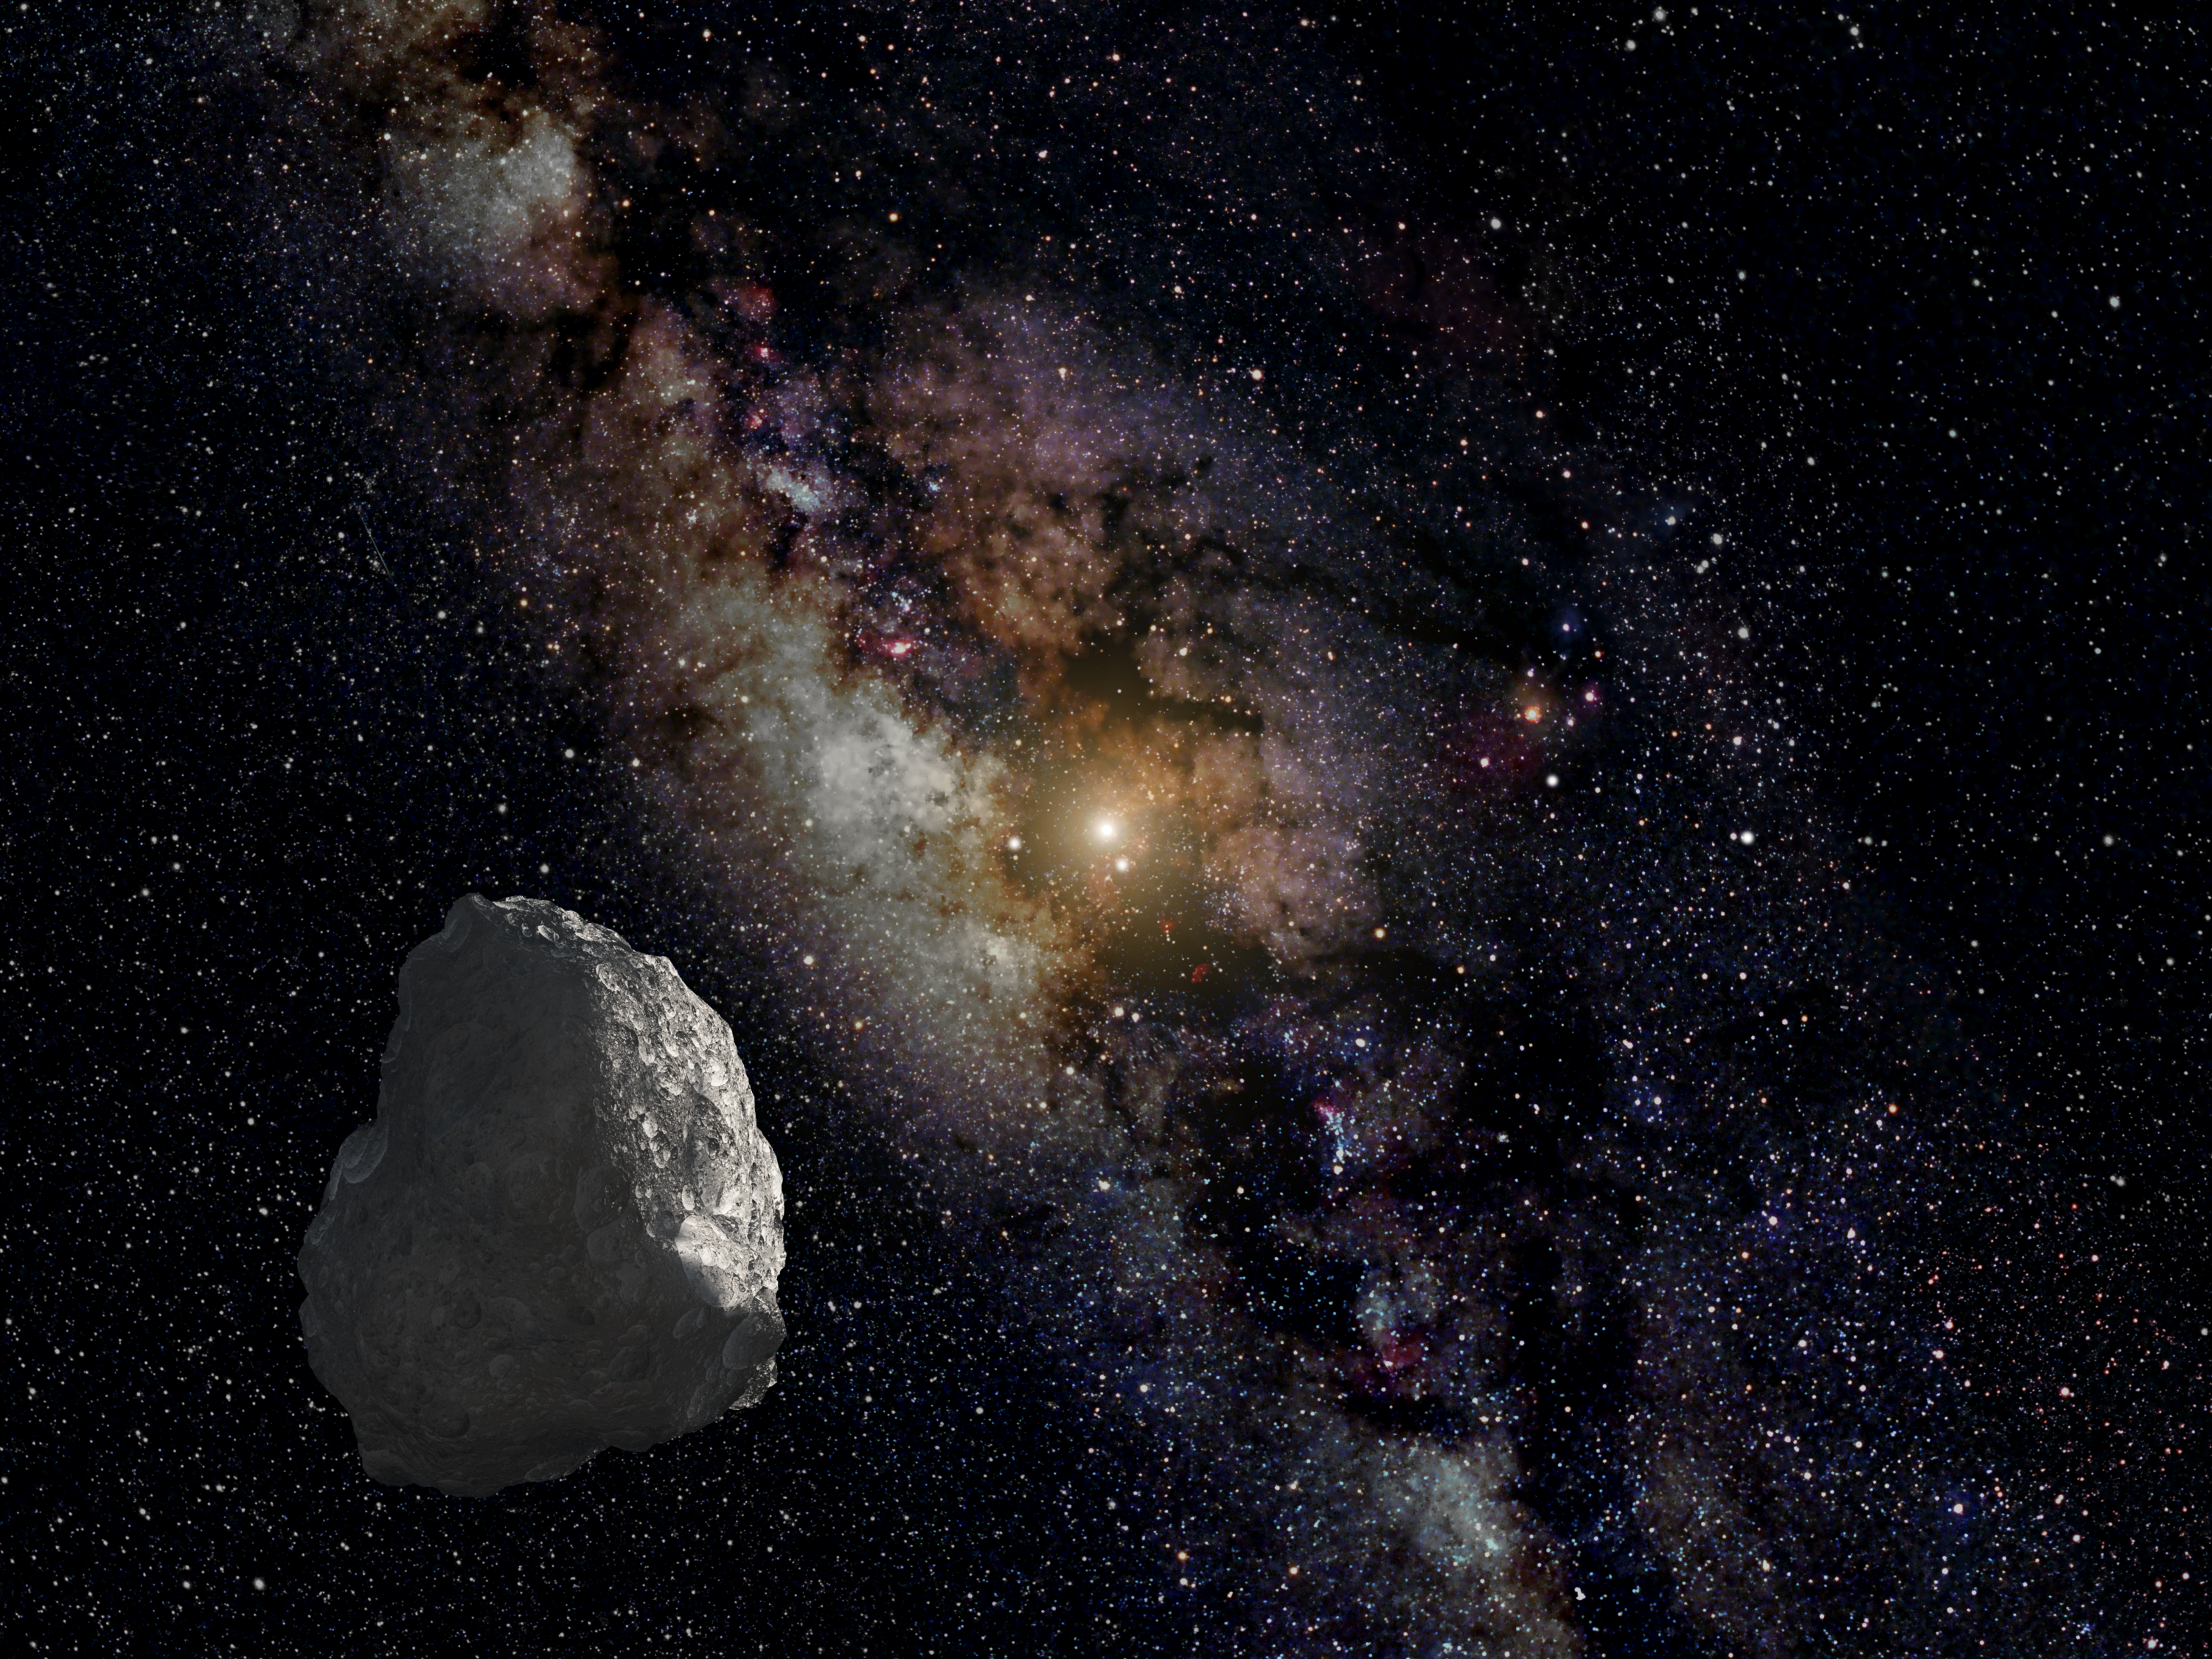

Artist’s impression of a Kuiper Belt object

This is an artist's impression of a Kuiper Belt object (KBO), located on the outer rim of our Solar System at a staggering distance of 6.5 billion kilometres from the Sun.

Unlike asteroids, KBOs have not been heated by the Sun, and so are thought to represent a pristine, well preserved, deep-freeze sample of what the outer Solar System was like following its birth 4.6 billion years ago.

The Sun appears as a bright star at image centre of this graphic, which represents the view from the KBO. The Earth and other inner planets are too close to the Sun to be seen in the illustration. The bright dot to the left of the Sun is the planet Jupiter, and the bright object below the Sun is the planet Saturn.

Two bright pinpoints of light to the right of the Sun, midway to the edge of the frame, are the planets Uranus and Neptune, respectively. The planet positions are plotted for late 2018. The Milky Way appears in the background.

A Hubble survey has uncovered three KBOs, ranging from 43 to 56 kilometres across, that are potentially reachable by NASA's New Horizons spacecraft after it passes by Pluto in mid-2015.

Credit: NASA, ESA, and G. Bacon (STScI)